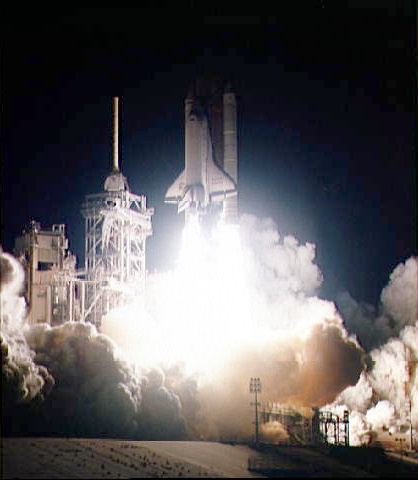

Launch of the Endeavour

The Space Shuttle Endeavour lifts off from Launch Pad 39B with a crew of six NASA astronauts, a Swiss mission specialist and a variety of specialtools aboard.

Credit: NASA/ESA